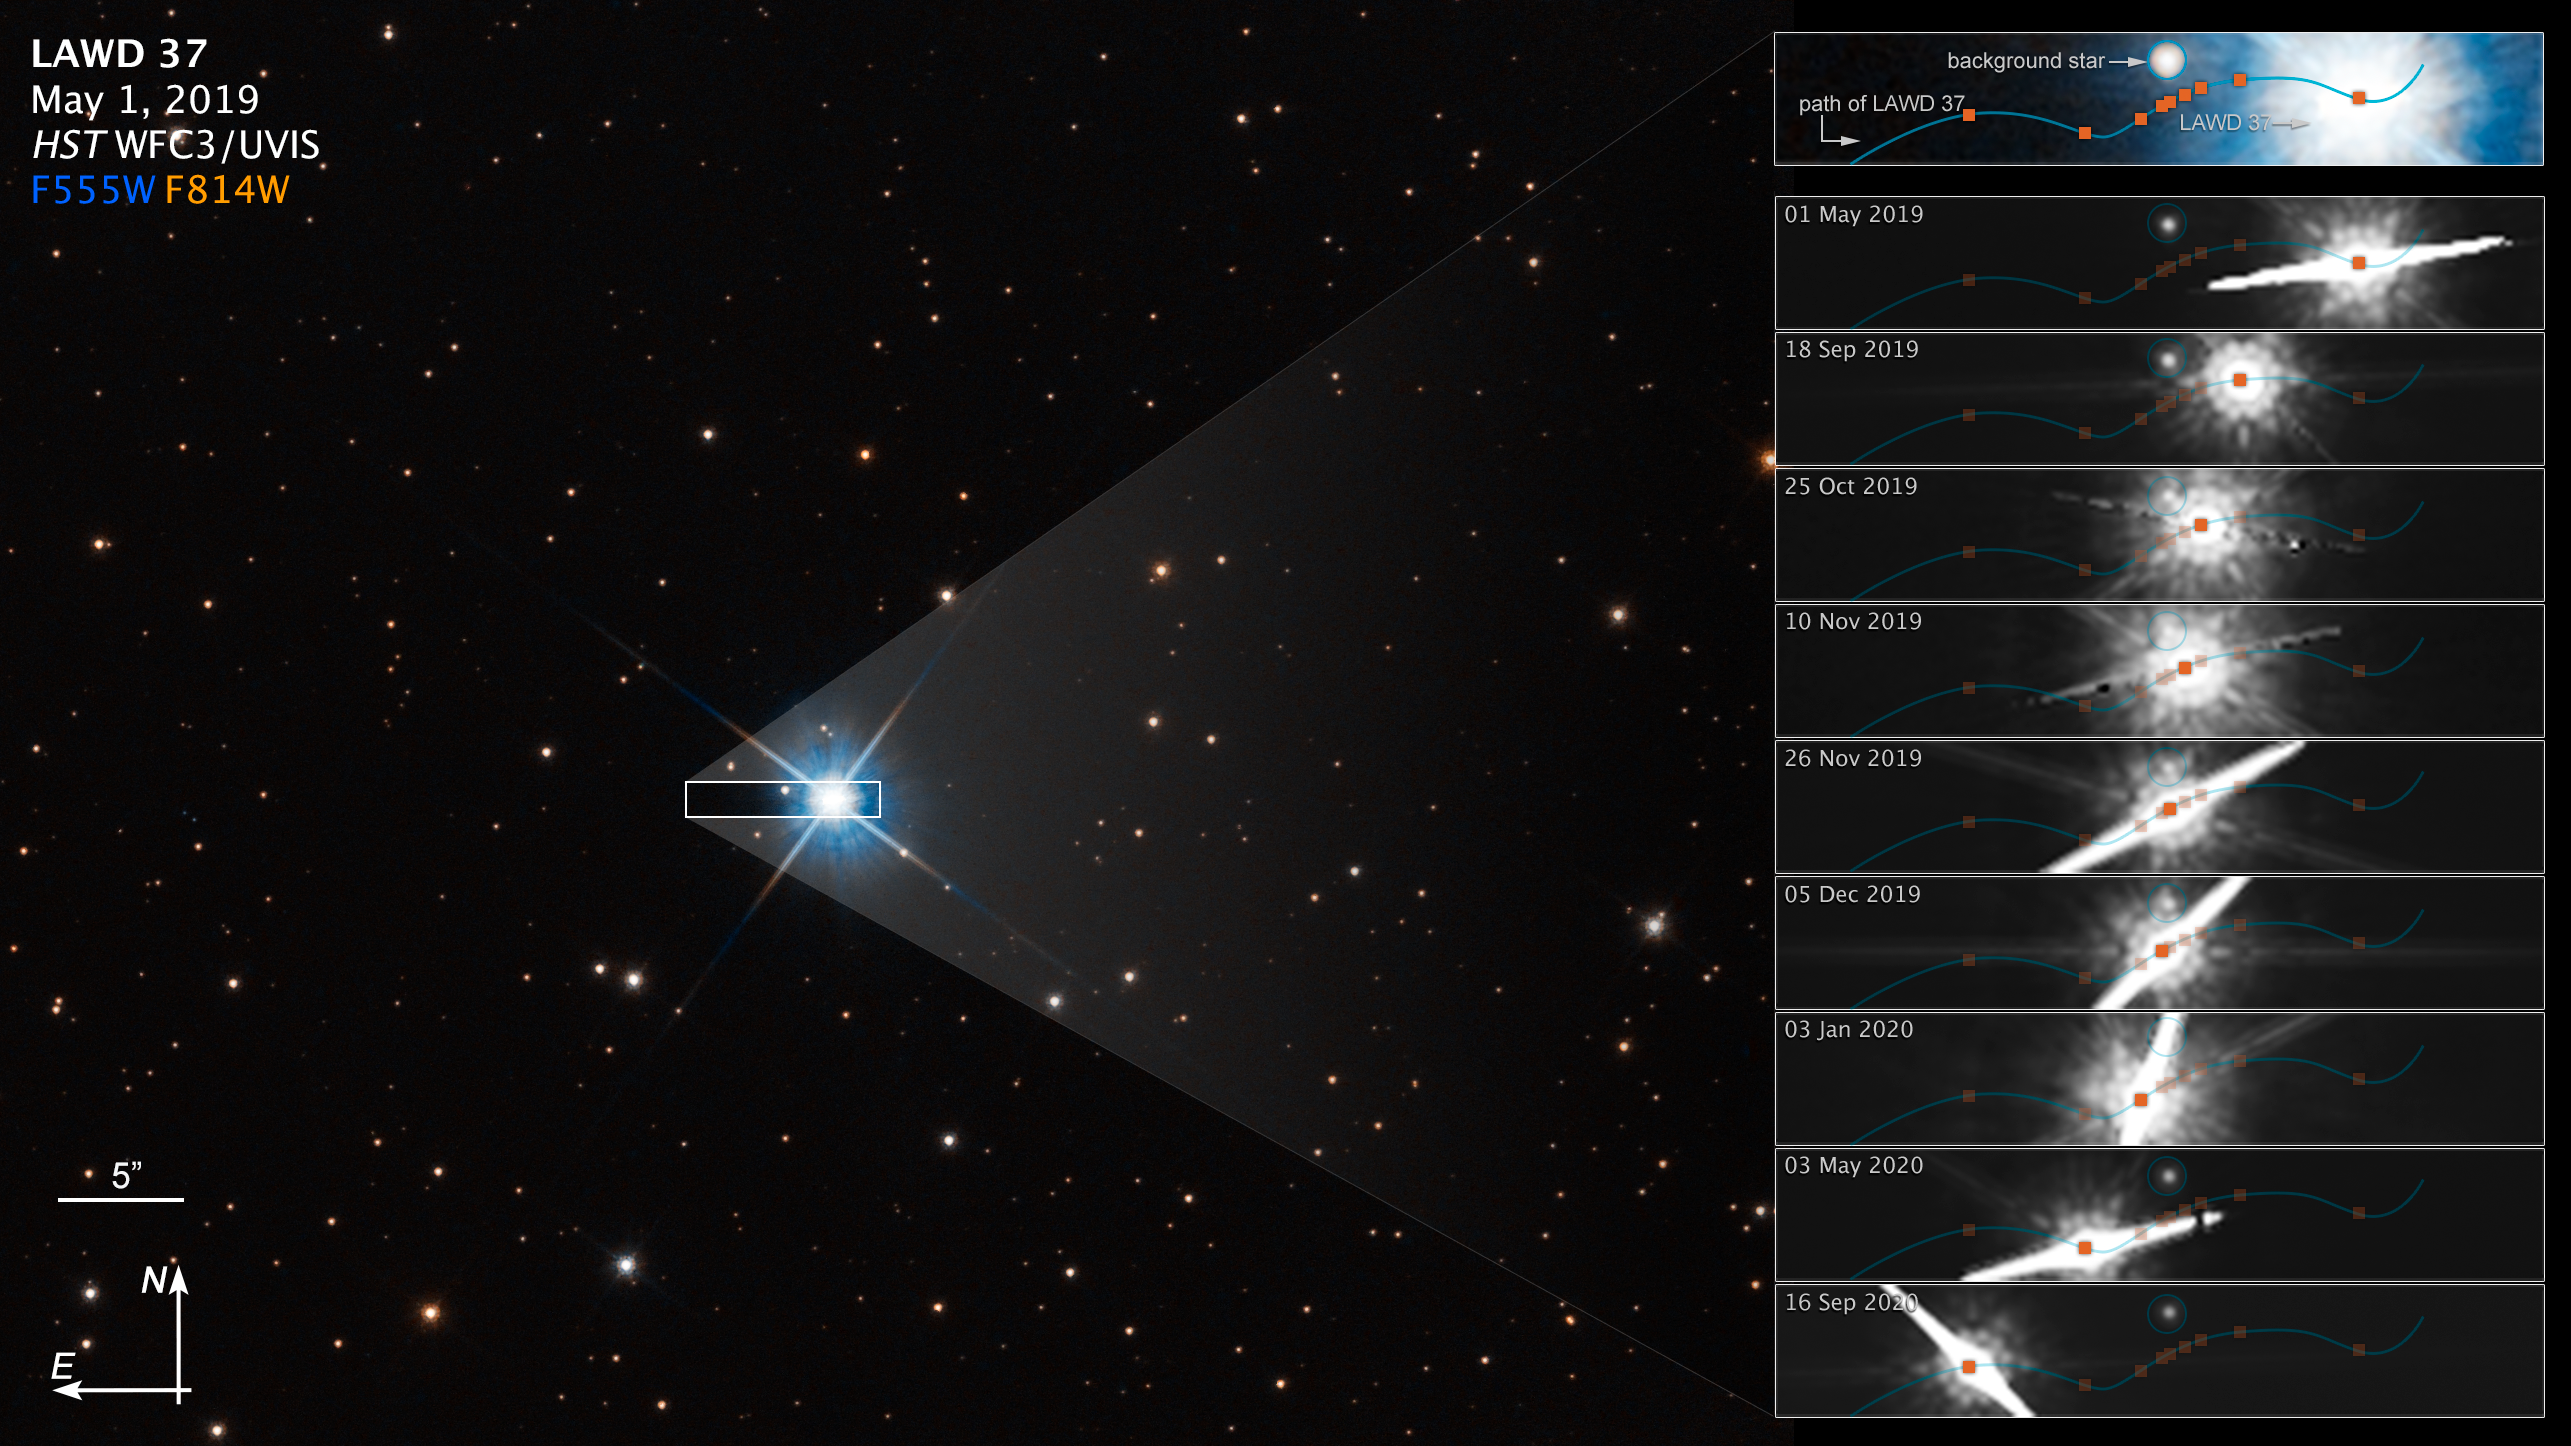

Hubble Uses Microlensing To Measure the Mass of a White Dwarf (Annotated)

This graphic shows how microlensing was used to measure the mass of a white dwarf star.

The dwarf, called LAWD 37, is a burned-out star in the centre of this Hubble Space Telescope image. Though its nuclear fusion furnace has shut down, trapped heat is sizzling on the surface at roughly 100 000 degrees Celsius, causing the stellar remnant to glow fiercely.

The inset boxes at right plot how the dwarf passed in front of a background star in 2019. The wavy blue line traces the dwarf’s apparent motion across the sky as seen from Earth. Though the dwarf is following a straight trajectory, the motion of Earth as it orbits the Sun imparts an apparent sinusoidal offset due to parallax. (The star is only 15 light-years away, and therefore is moving at a faster rate against the stellar background.)

As it passed by the fainter background star, the dwarf’s gravitational field warped space (as Einstein’s general theory of relativity predicted a century ago). And this deflection was precisely measured by Hubble’s extraordinary resolution. The dwarf’s offset position is coloured orange.

The amount of deflection yields a mass for the white dwarf of 56 percent our Sun’s mass, and this provides insights into theories of the structure and composition of white dwarfs. This is the first time that astronomers have directly measured the mass of a single, isolated star other than our Sun.

The white dwarf has a ‘spike’ because it is so bright that the light ‘bled’ into the Hubble camera’s CCD detector. This interfered with one of the observing dates for measuring that background star’s position on the sky.

The compass graphic points to the object’s orientation on the celestial sphere. North points to the north celestial pole which is not a fixed point in the sky, but it currently lies near the star Polaris, in the circumpolar constellation Ursa Minor. Celestial coordinates are analogous to a terrestrial map, though east and west are transposed because we are looking up rather than down.

Credit: NASA, ESA, P. McGill (Univ. of California, Santa Cruz and University of Cambridge), K. Sahu (STScI), J. Depasquale (STScI)